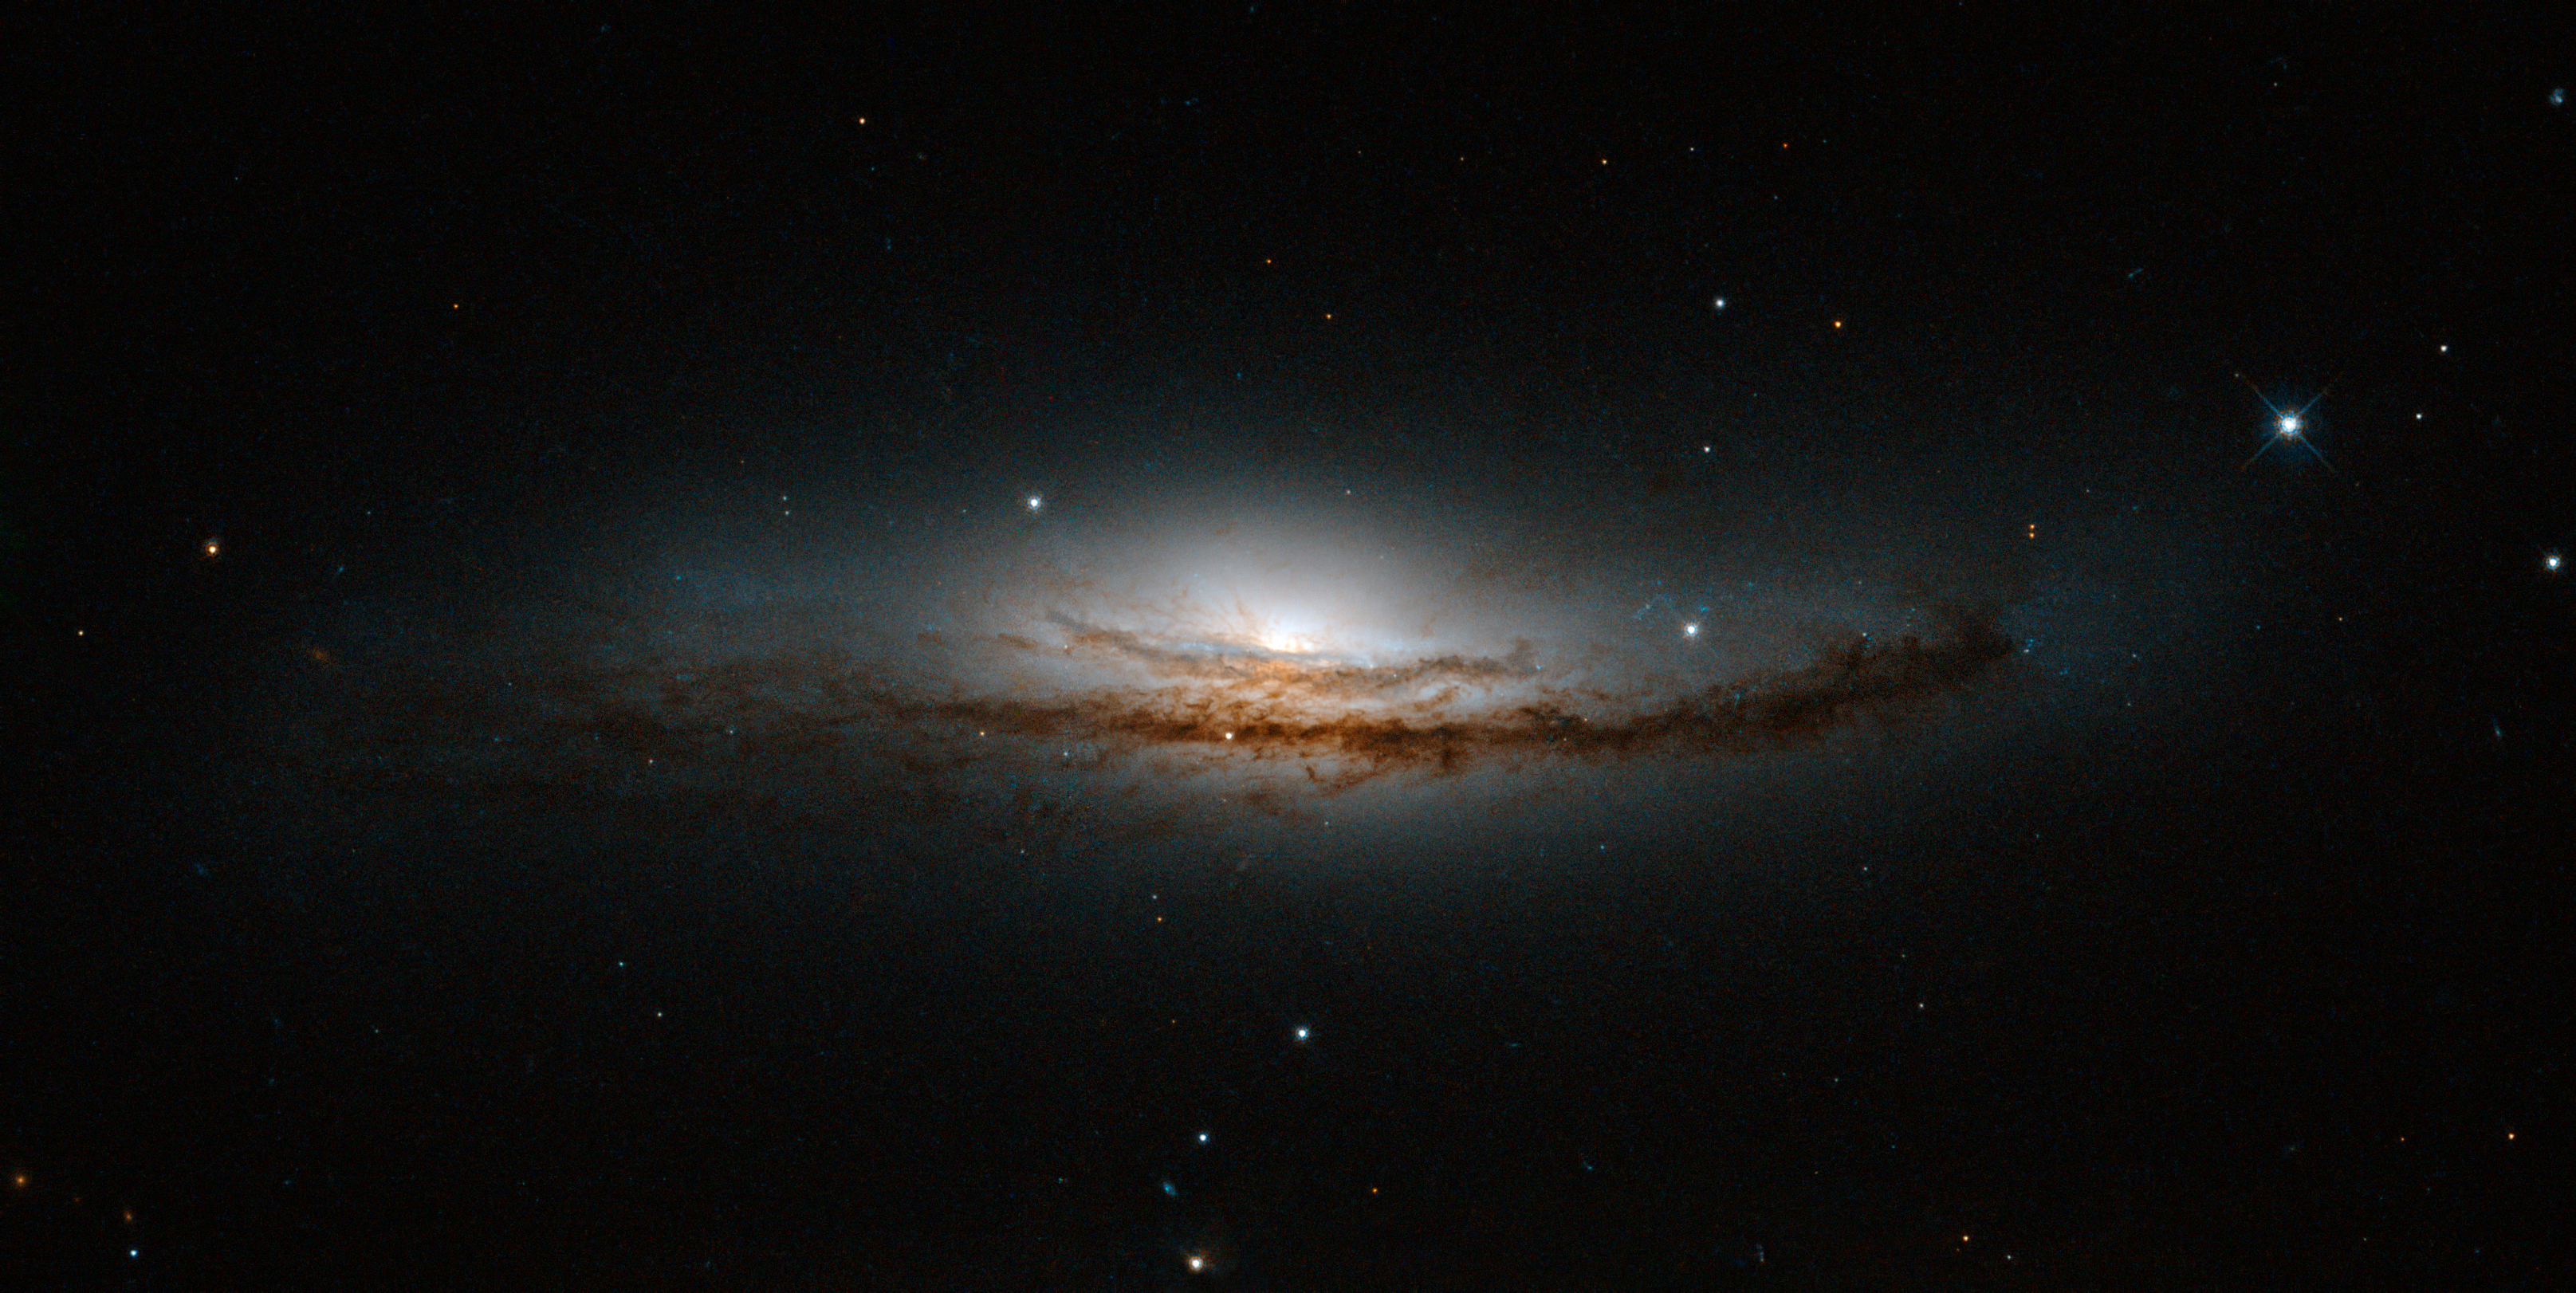

Secrets at the heart of NGC 5793

This new Hubble image is centred on NGC 5793, a spiral galaxy over 150 million light-years away in the constellation of Libra. This galaxy has two particularly striking features: a beautiful dust lane and an intensely bright centre — much brighter than that of our own galaxy, or indeed those of most spiral galaxies we observe.

NGC 5793 is a Seyfert galaxy. These galaxies have incredibly luminous centres that are thought to be caused by hungry supermassive black holes — black holes that can be billions of times the size of the Sun — that pull in and devour gas and dust from their surroundings.

This galaxy is of great interest to astronomers for many reasons. For one, it appears to house objects known as masers. Whereas lasers emit visible light, masers emit microwave radiation [1]. Naturally occurring masers, like those observed in NGC 5793, can tell us a lot about their environment; we see these kinds of masers in areas where stars are forming. In NGC 5793 there are also intense mega-masers, which are thousands of times more luminous than the Sun.

A version of this image was submitted to the Hubble’s Hidden Treasures image processing competition by contestant Judy Schmidt.

Notes:
[1] This name originates from the acronym Microwave Amplification by Stimulated Emission of Radiation. Maser emission is caused by particles that absorb energy from their surroundings and then re-emit this in the microwave part of the spectrum.

Credit: NASA, ESA, and E. Perlman (Florida Institute of Technology) Acknowledgement: Judy Schmidt